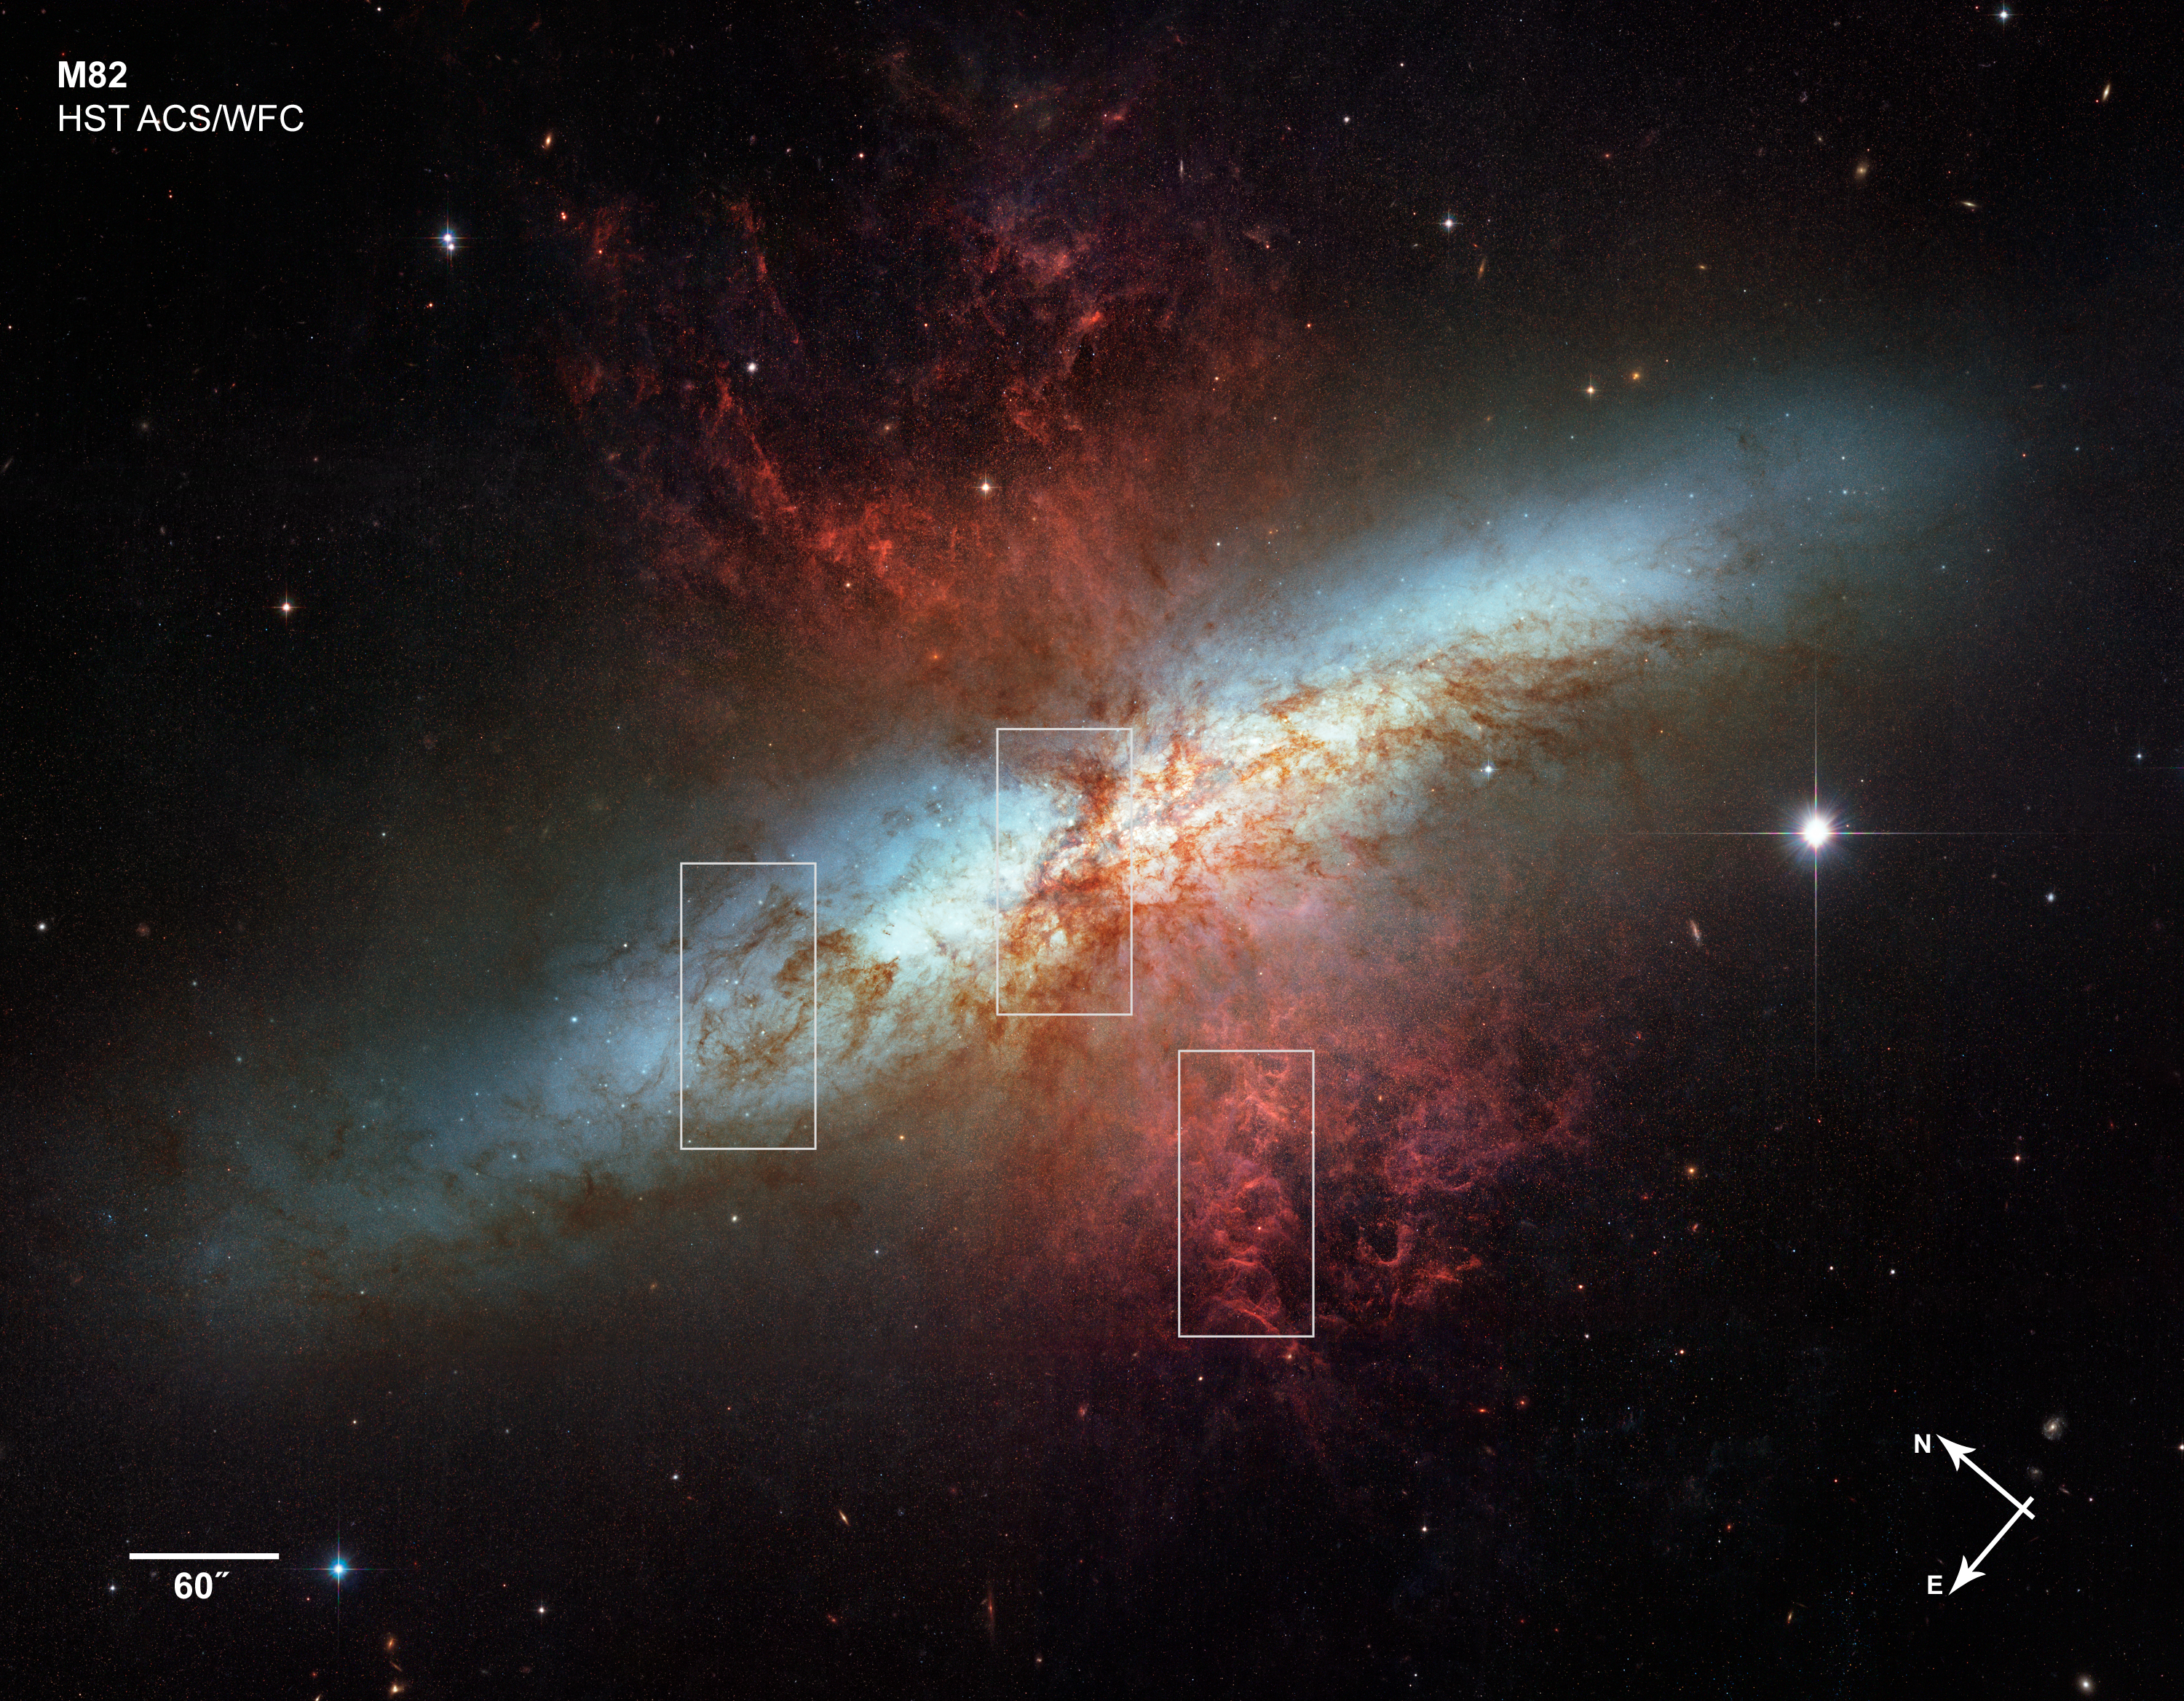

Location of the Messier 82 details

This image shows the location of the three close-up pictures in the Details in Messier 82 image.

Credit: NASA, ESA and the Hubble Heritage Team (STScI/AURA). Acknowledgment: J. Gallagher (University of Wisconsin), M. Mountain (STScI) and P. Puxley (NSF).